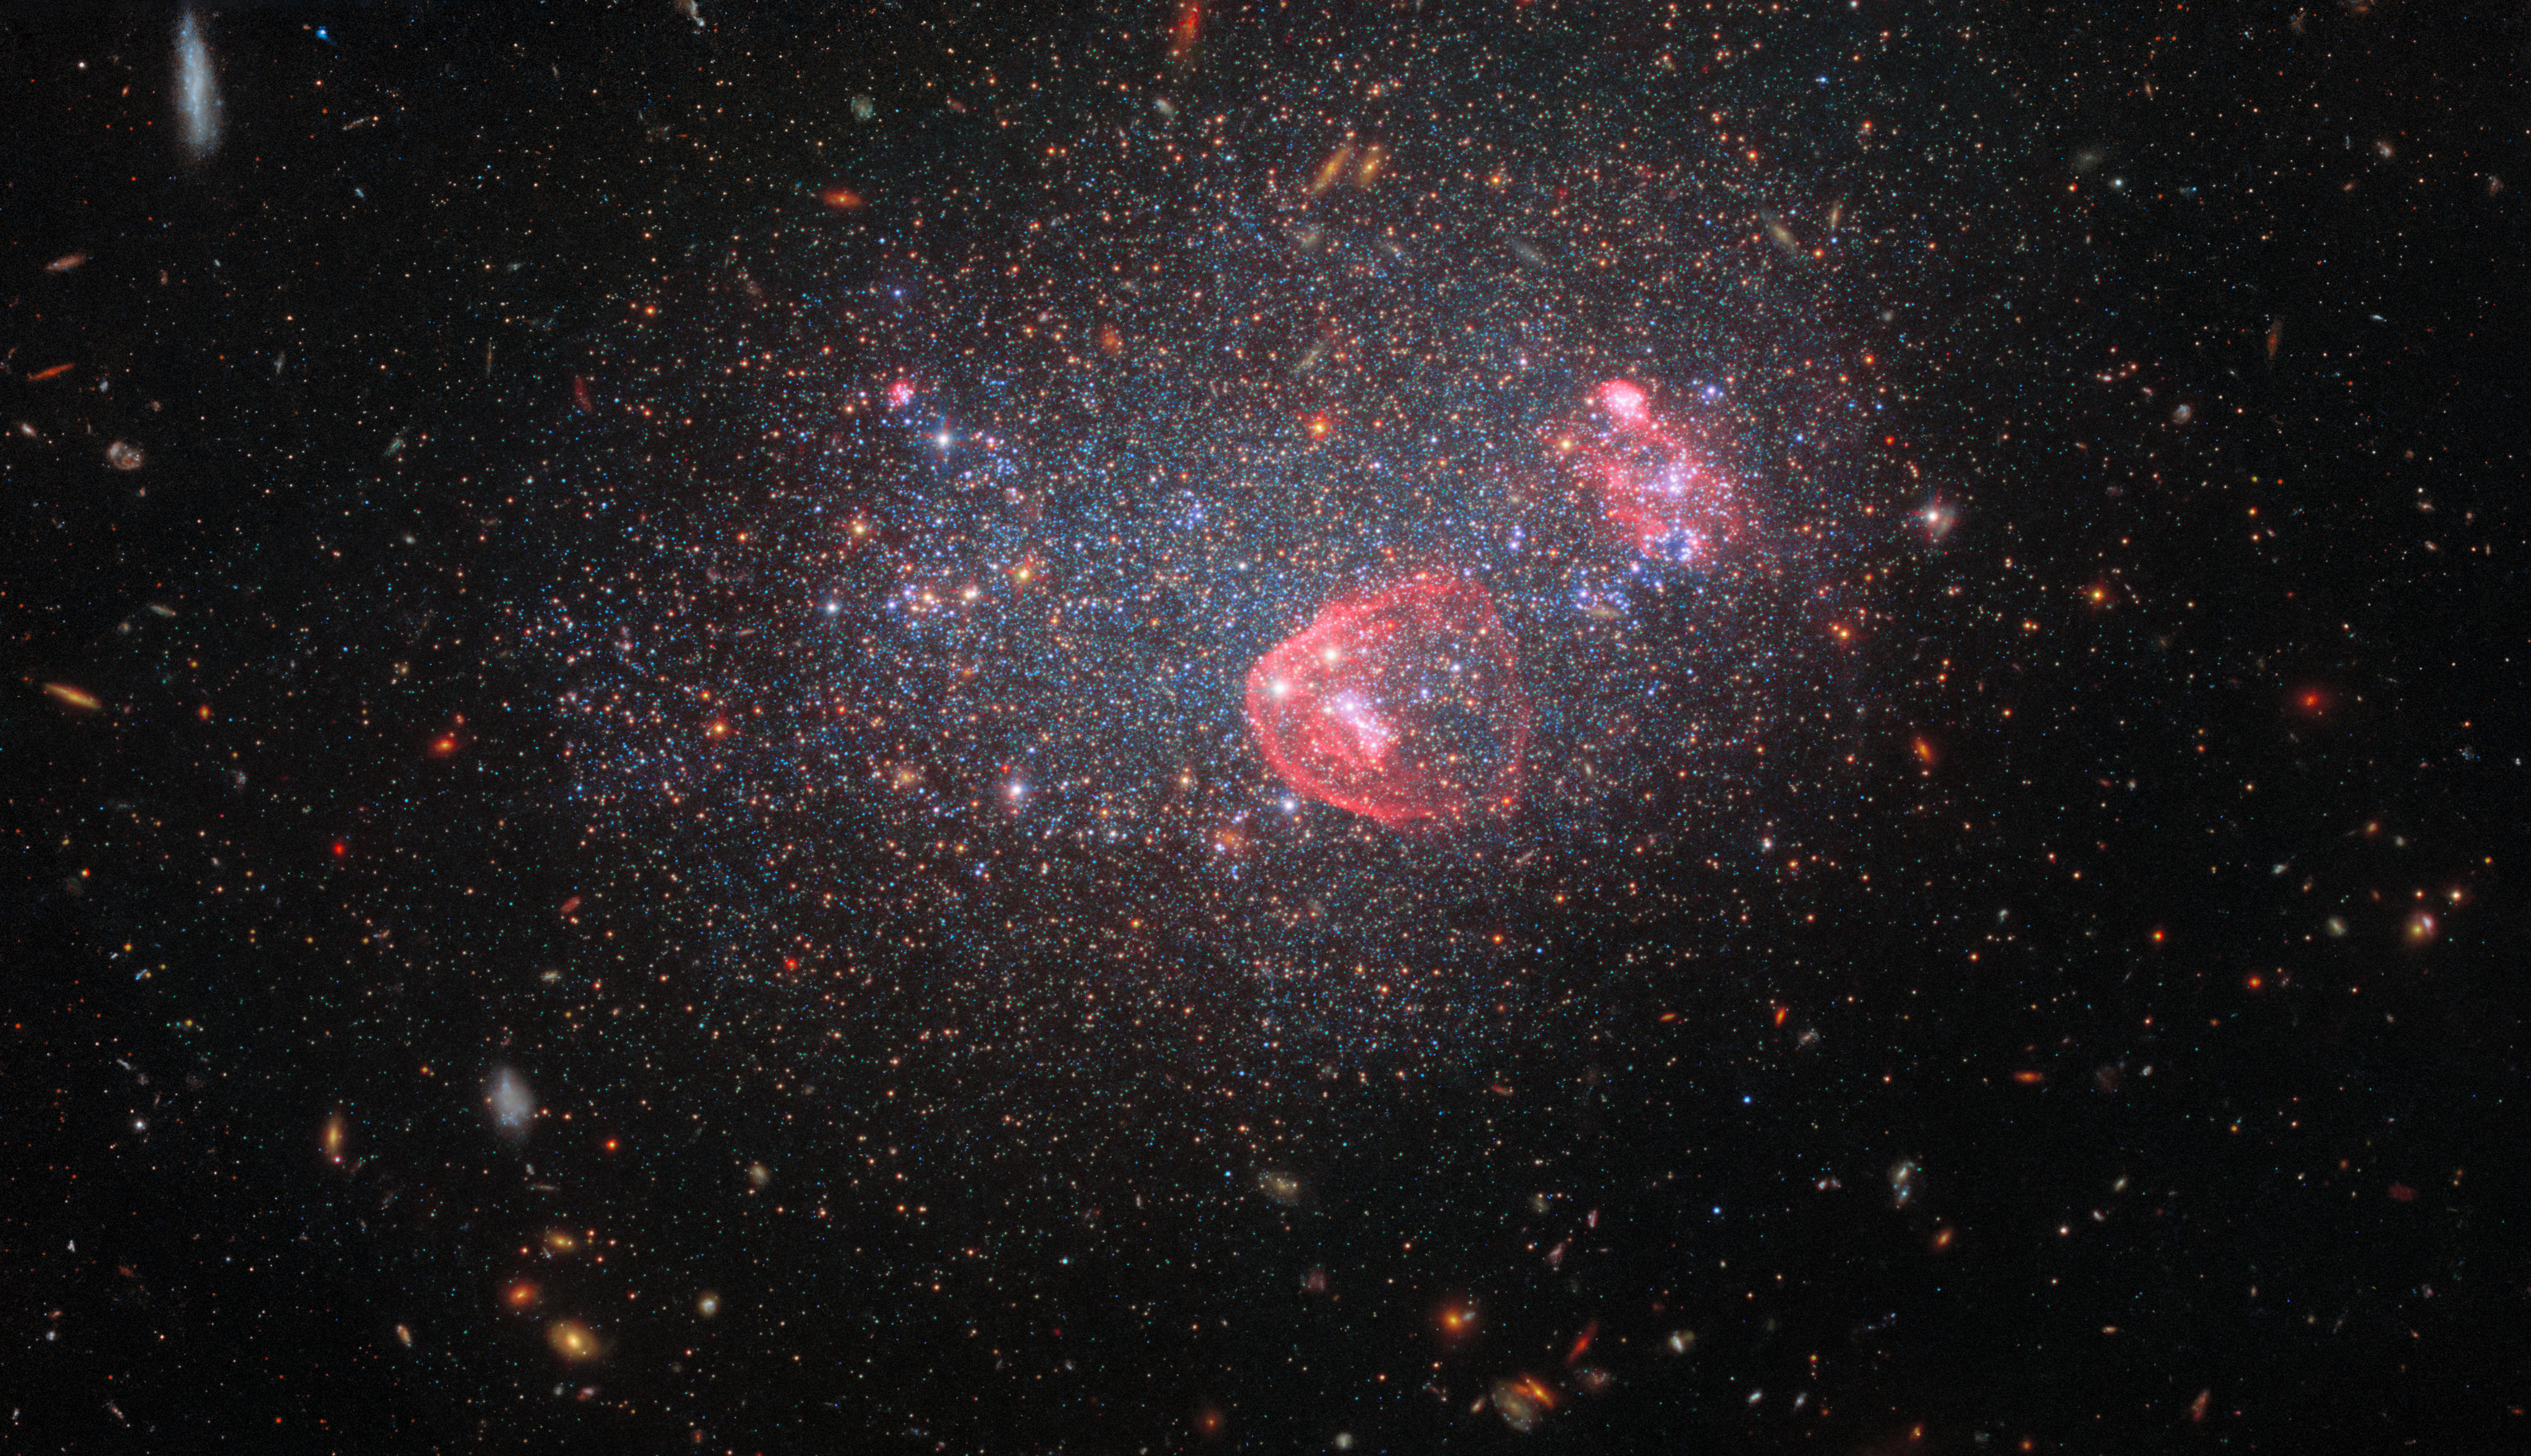

Dwarf irregular galaxy UGC 8091

For the end of the year and the holiday season Hubble has captured the festive bundle of lights known as UGC 8091. UGC 8091, also known as GR 8, lies around seven million light-years from Earth in the constellation Virgo. It is a dwarf irregular galaxy: a comparatively small, low-mass galaxy without a distinct or uniform shape.

The filters used in this image date from 2006 up to 2021, and were taken by two of Hubble’s most advanced instruments: the Wide Field Camera 3 and the Advanced Camera for Surveys. An astonishing twelve filters combine to produce this image, with light from the mid-ultraviolet right through to the red end of the visible spectrum contributing. The blossoming patches of red represent light emitted by excited hydrogen molecules in hot, energetic stars that have formed in recent starbursts. The other glittering lights on show are a mix of older stars.

Credit: ESA/Hubble, NASA Y. Choi (NOIRLab), K. Gilbert (Space Telescope Science Institute), J. Dalcanton (Flatiron Institute and University of Washington)